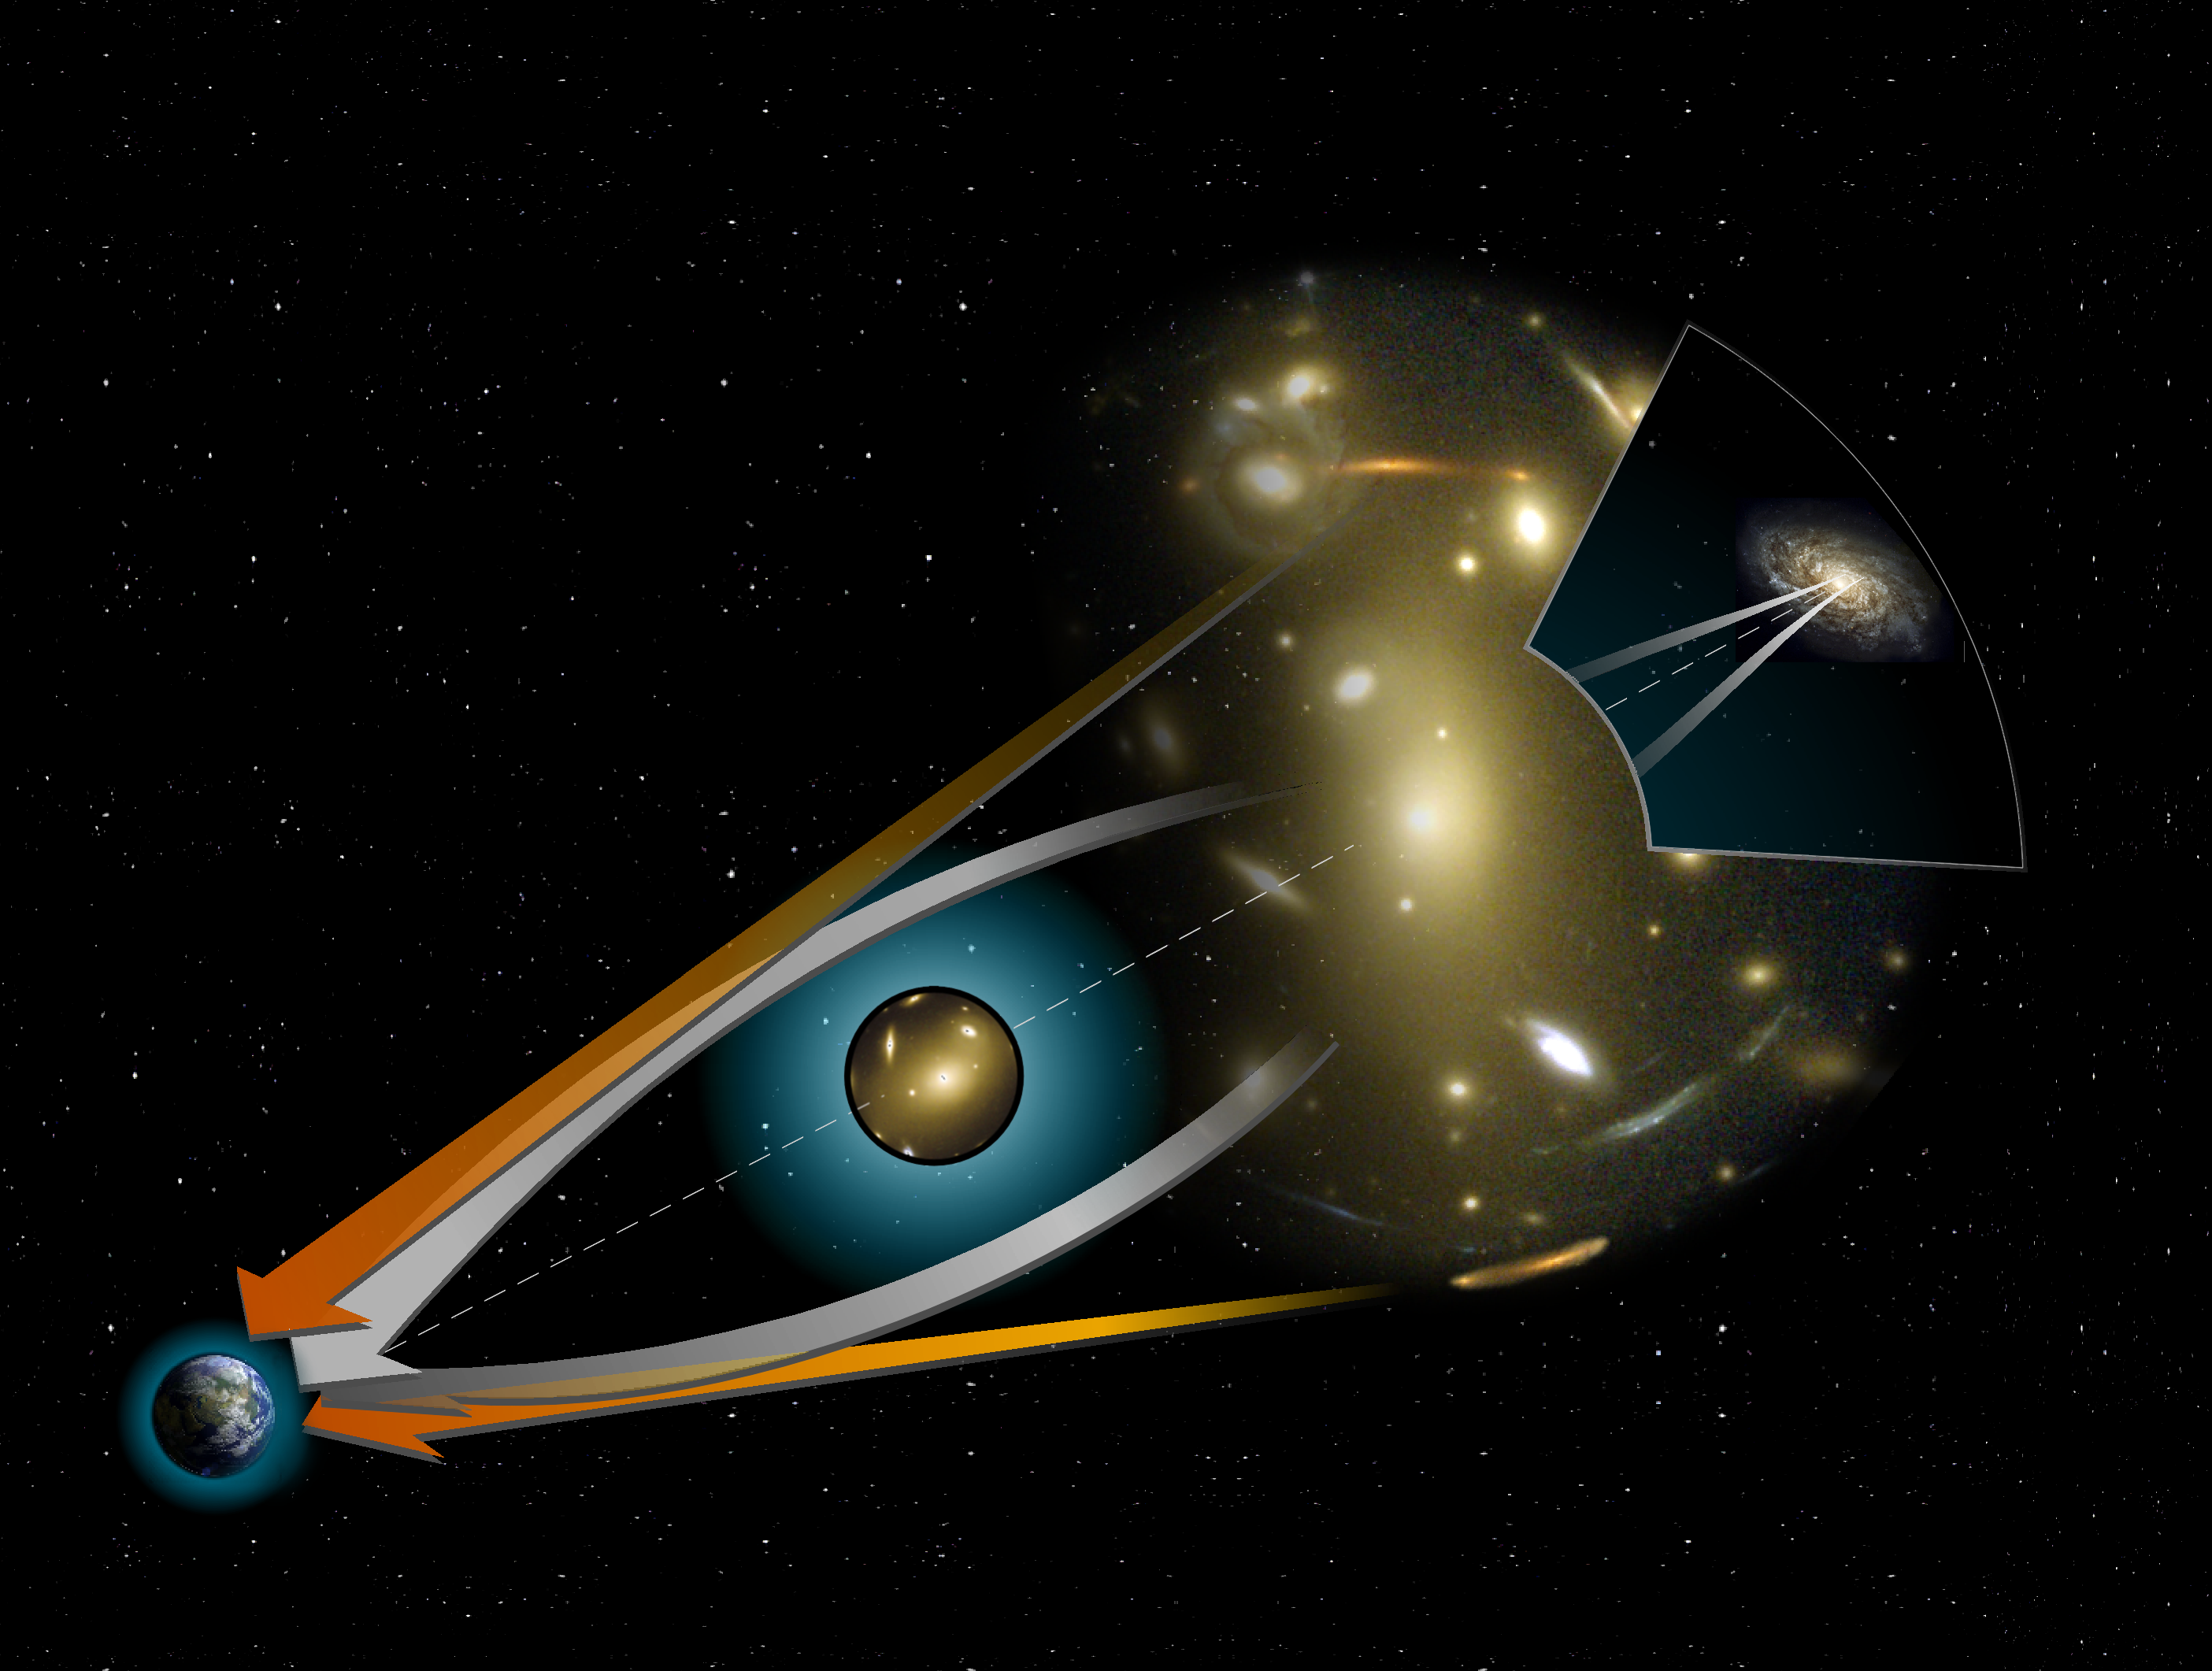

Gravitational Lensing

Just as a wanderer in the desert can experience mirages, when light from remote objects is bent by the warm air hovering just above the sand, we may also see mirages in the Universe. The mirages we see with a modern telescope like the Hubble Space Telescope do not arise from oases, but instead from remote clusters of galaxies - huge concentrations of mass.

Credit: NASA, ESA, Andrew Fruchter (STScI), and the ERO team (STScI + ST-ECF)